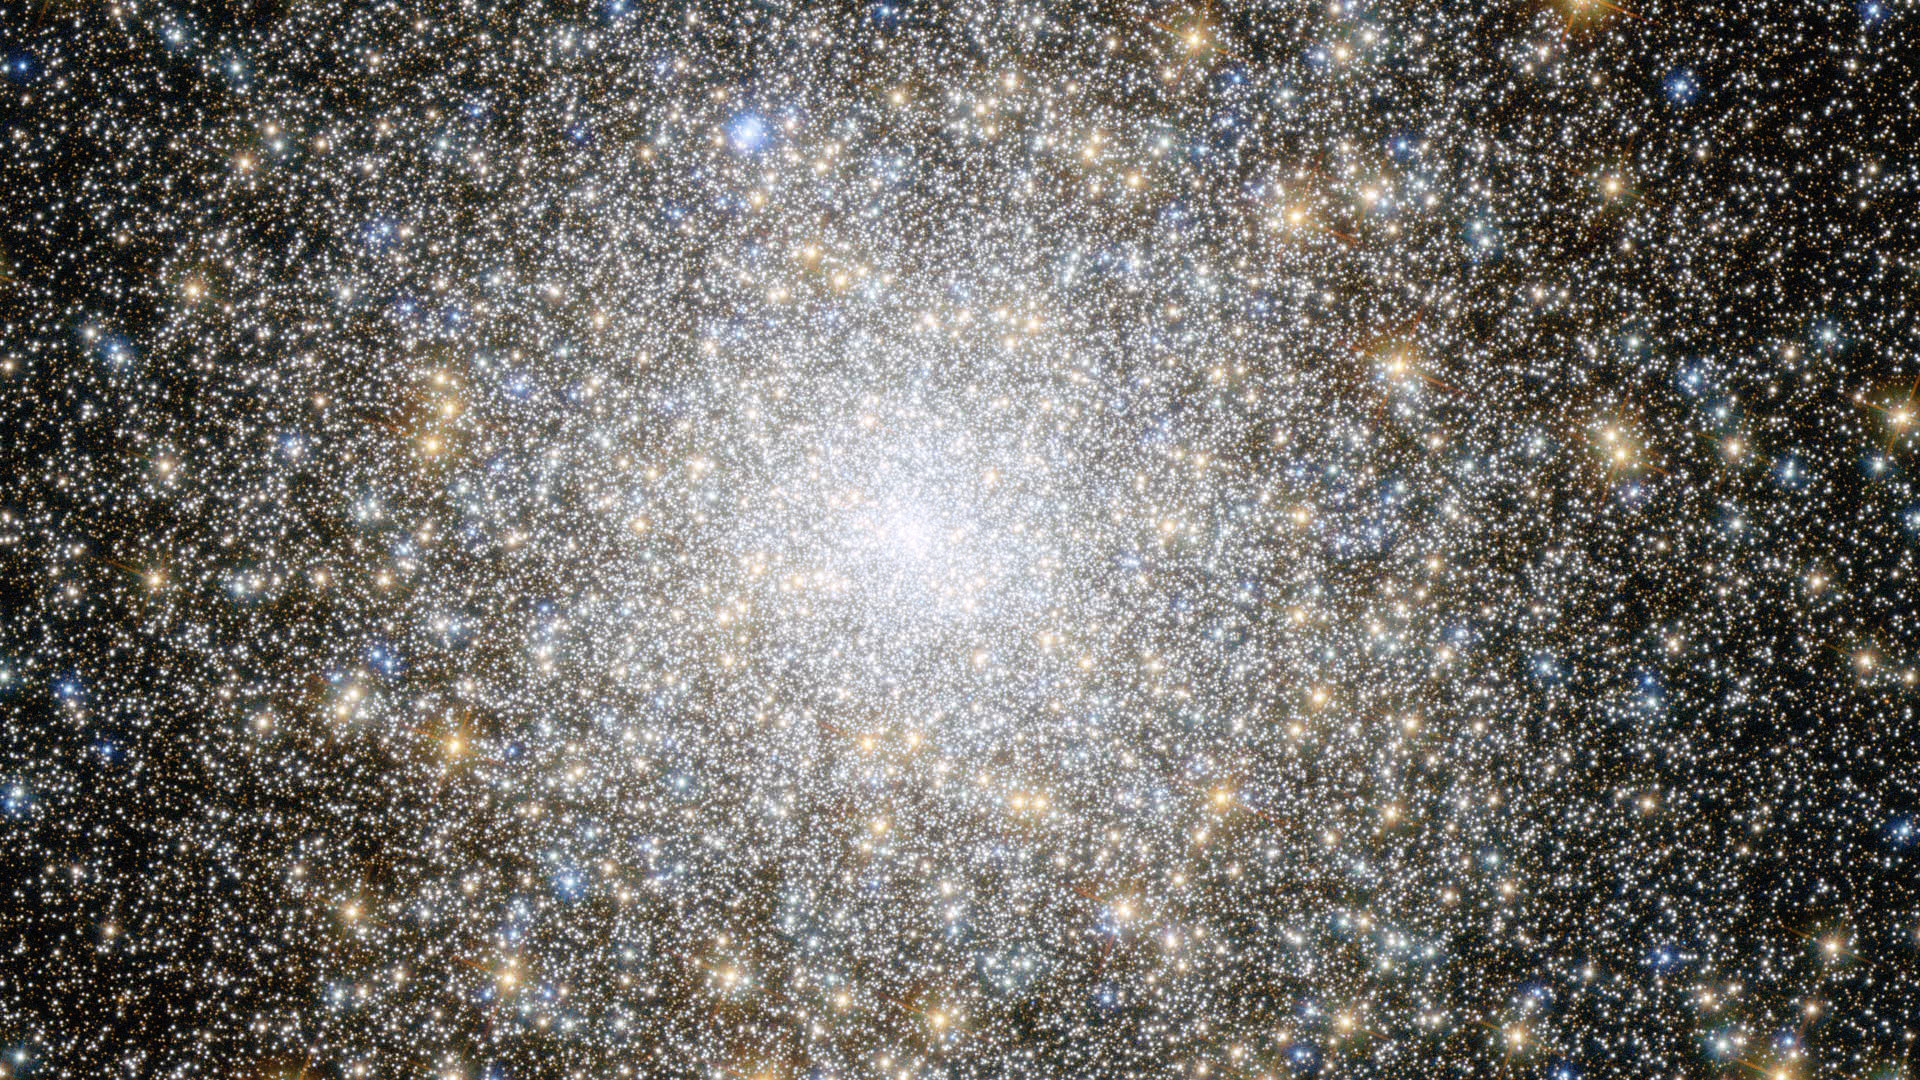

Screenshot of Hubblecast 69

Screenshot of Hubblecast 69: What has Hubble learned from star clusters?.

Credit: NASA & ESA